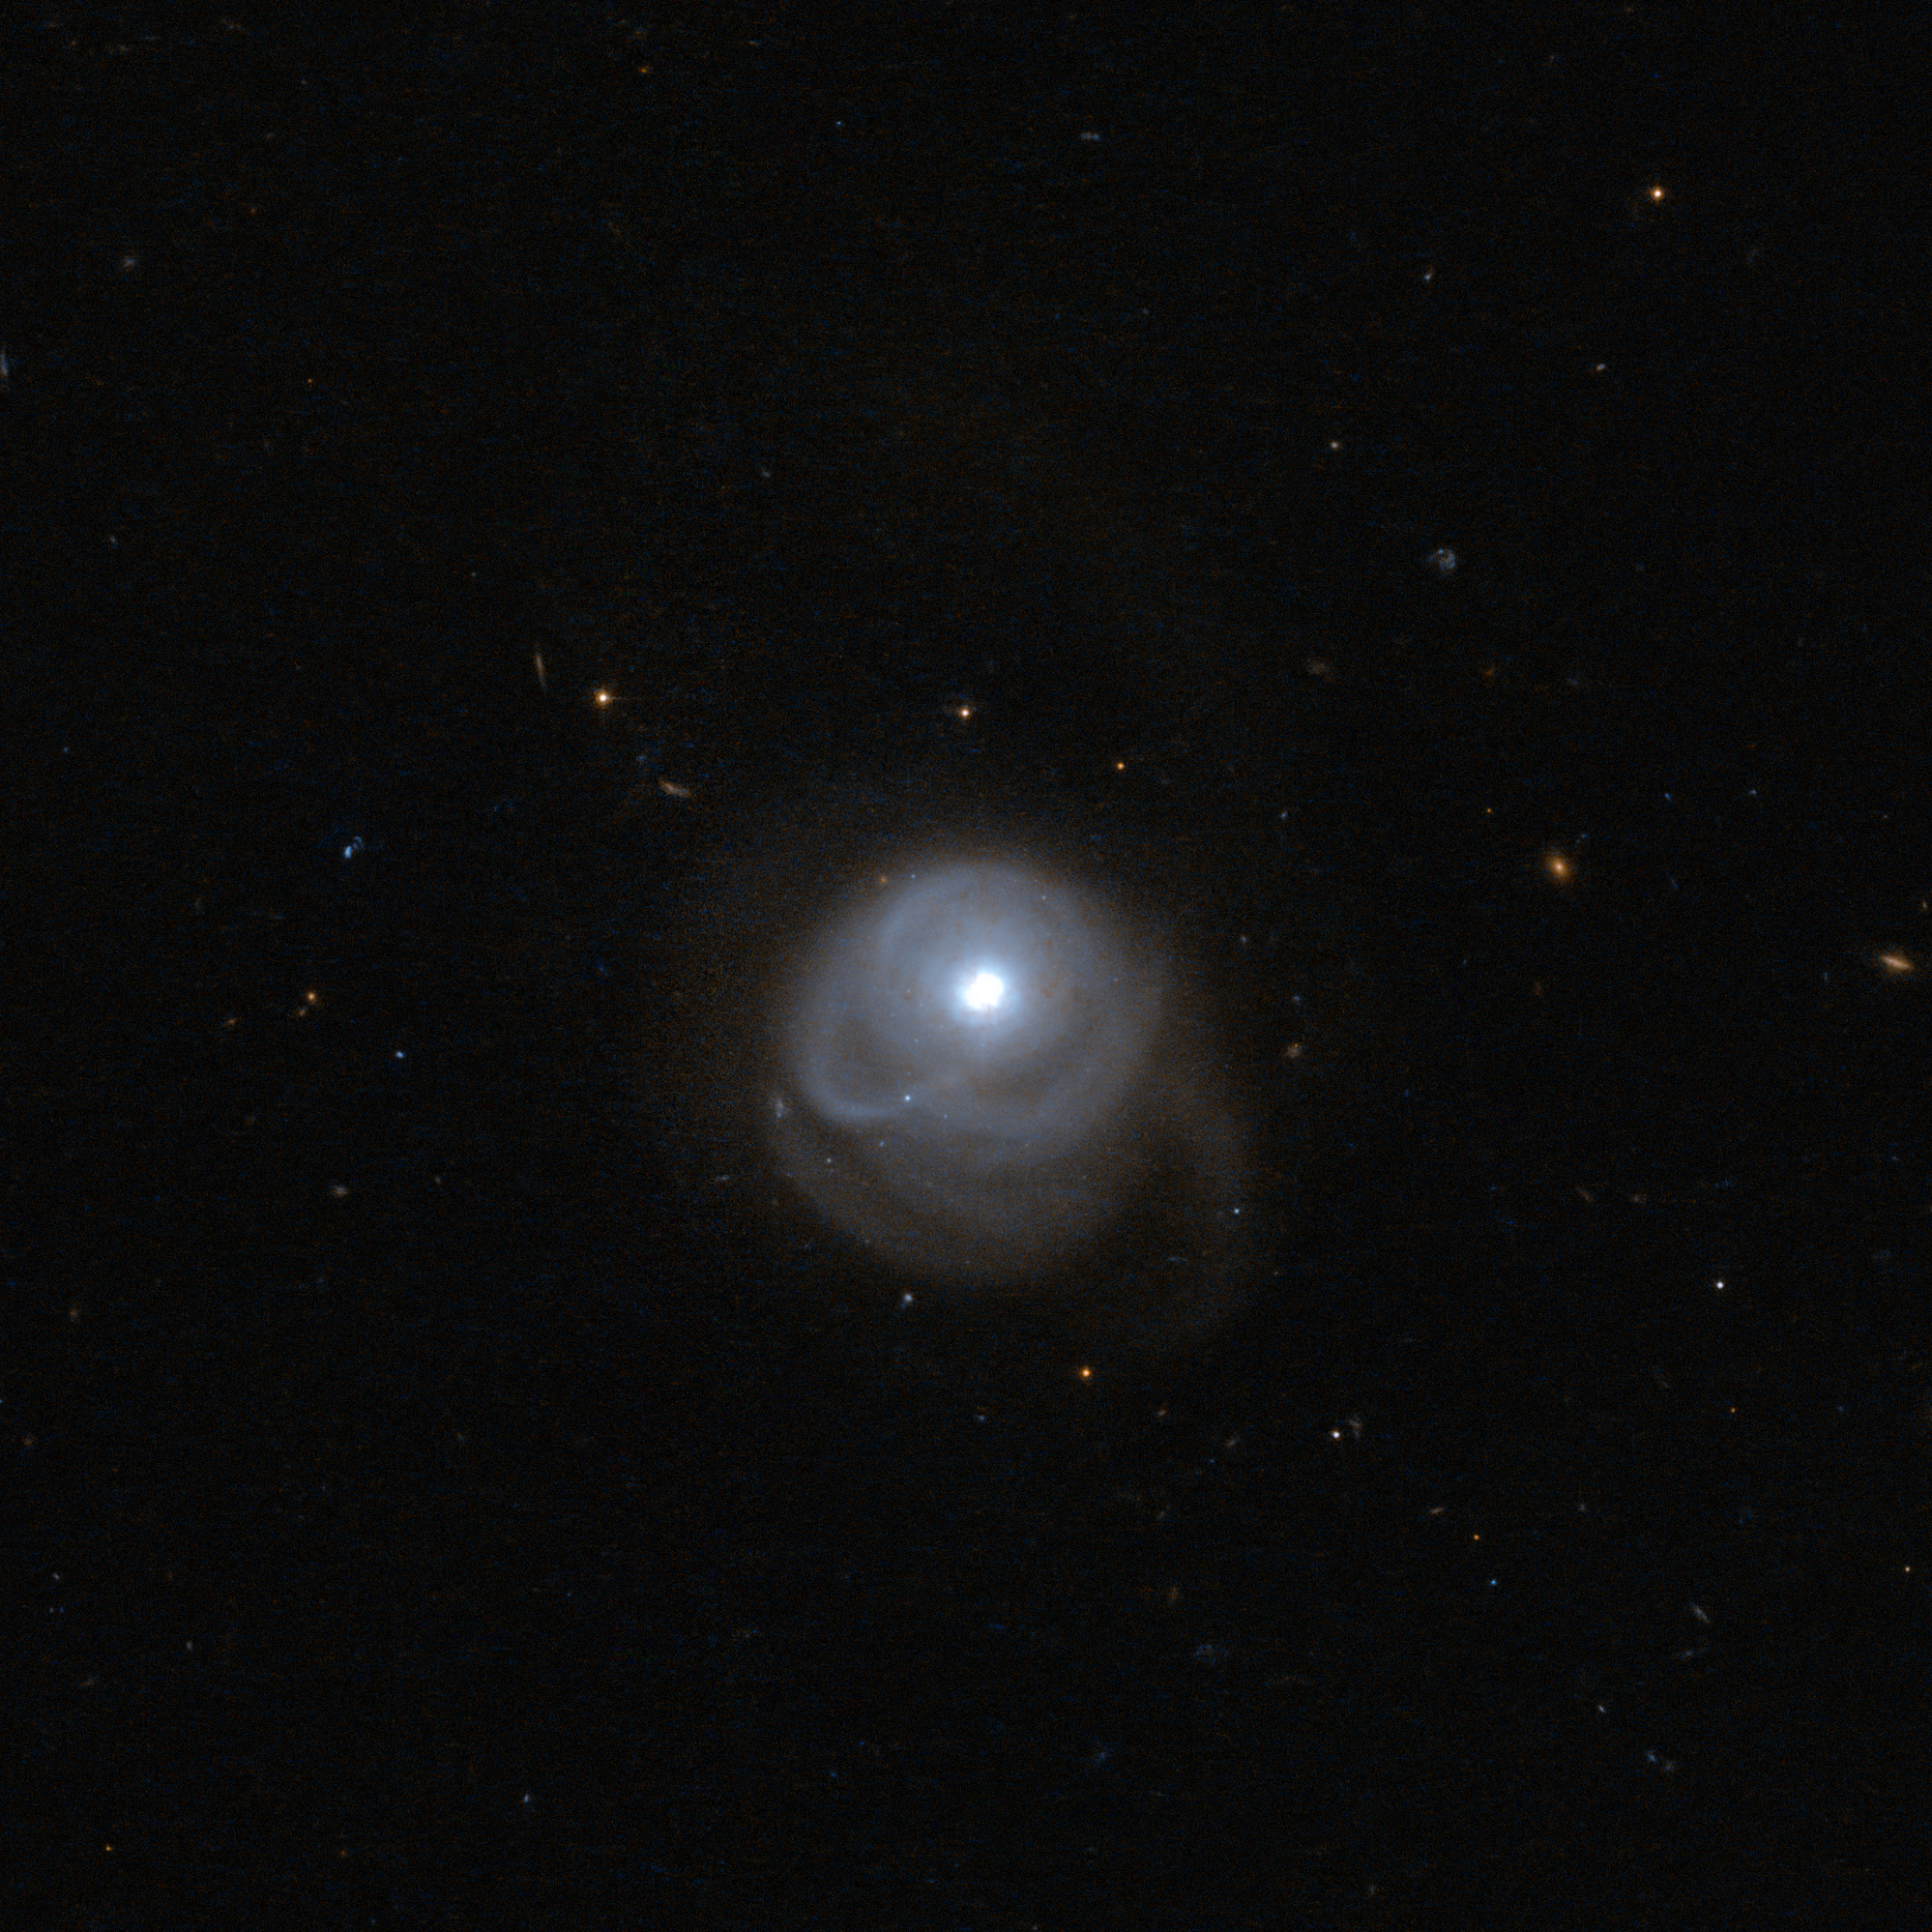

A tale of galactic collisions

When we look into the distant cosmos, the great majority of the objects we see are galaxies: immense gatherings of stars, planets, gas, dust, and dark matter, showing up in all kind of shapes. This Hubble picture registers several, but the galaxy catalogued as 2MASX J05210136-2521450 stands out at a glance due to its interesting shape.

This object is an ultraluminous infrared galaxy which emits a tremendous amount of light at infrared wavelengths. Scientists connect this to intense star formation activity, triggered by a collision between two interacting galaxies.

The merging process has left its signs: 2MASX J05210136-2521450 presents a single, bright nucleus and a spectacular outer structure that consists of a one-sided extension of the inner arms, with a tidal tail heading in the opposite direction, formed from material ripped out from the merging galaxies by gravitational forces.

The image is a combination of exposures taken by Hubble’s Advanced Camera for Surveys, using near-infrared and visible light. A version of this image was submitted to the Hubble’s Hidden Treasures image processing competition by contestant Luca Limatola.

Credit: ESA/Hubble & NASA Acknowledgement: Luca Limatola